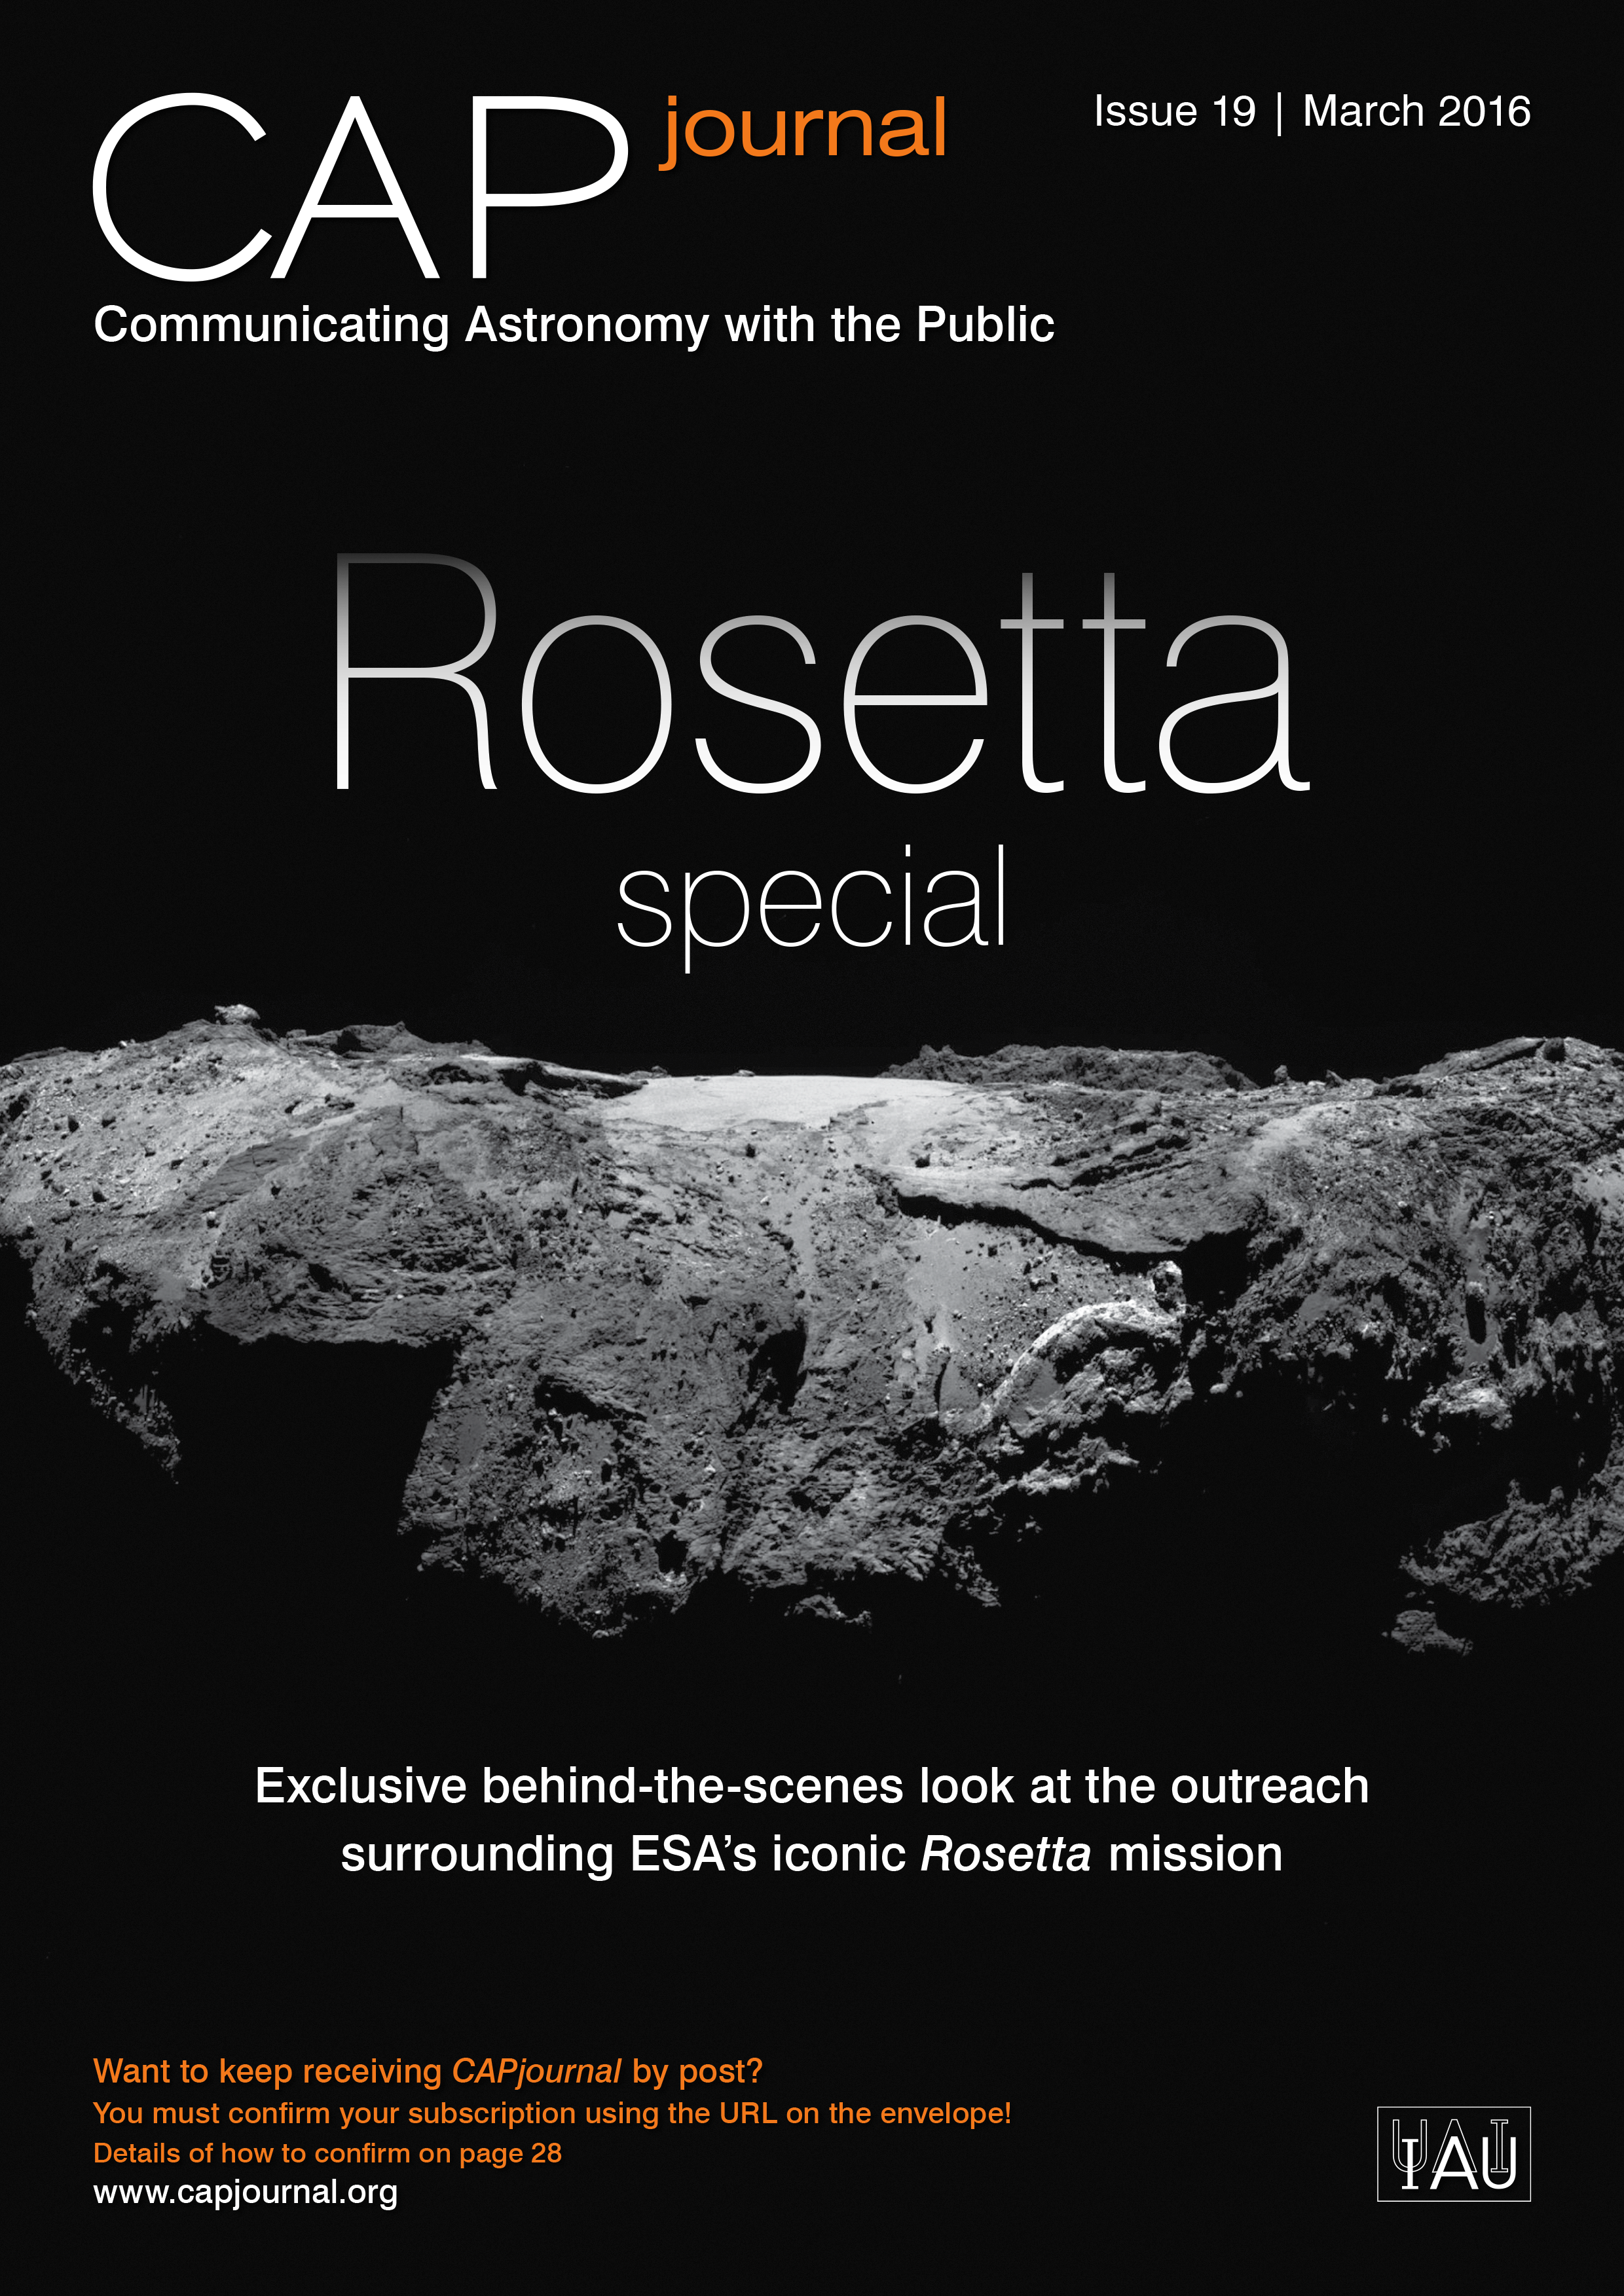

Cover picture of CAP Journal issue 19

Cover picture of CAP Journal issue 19

Credit: ESO/ESA/Hubble